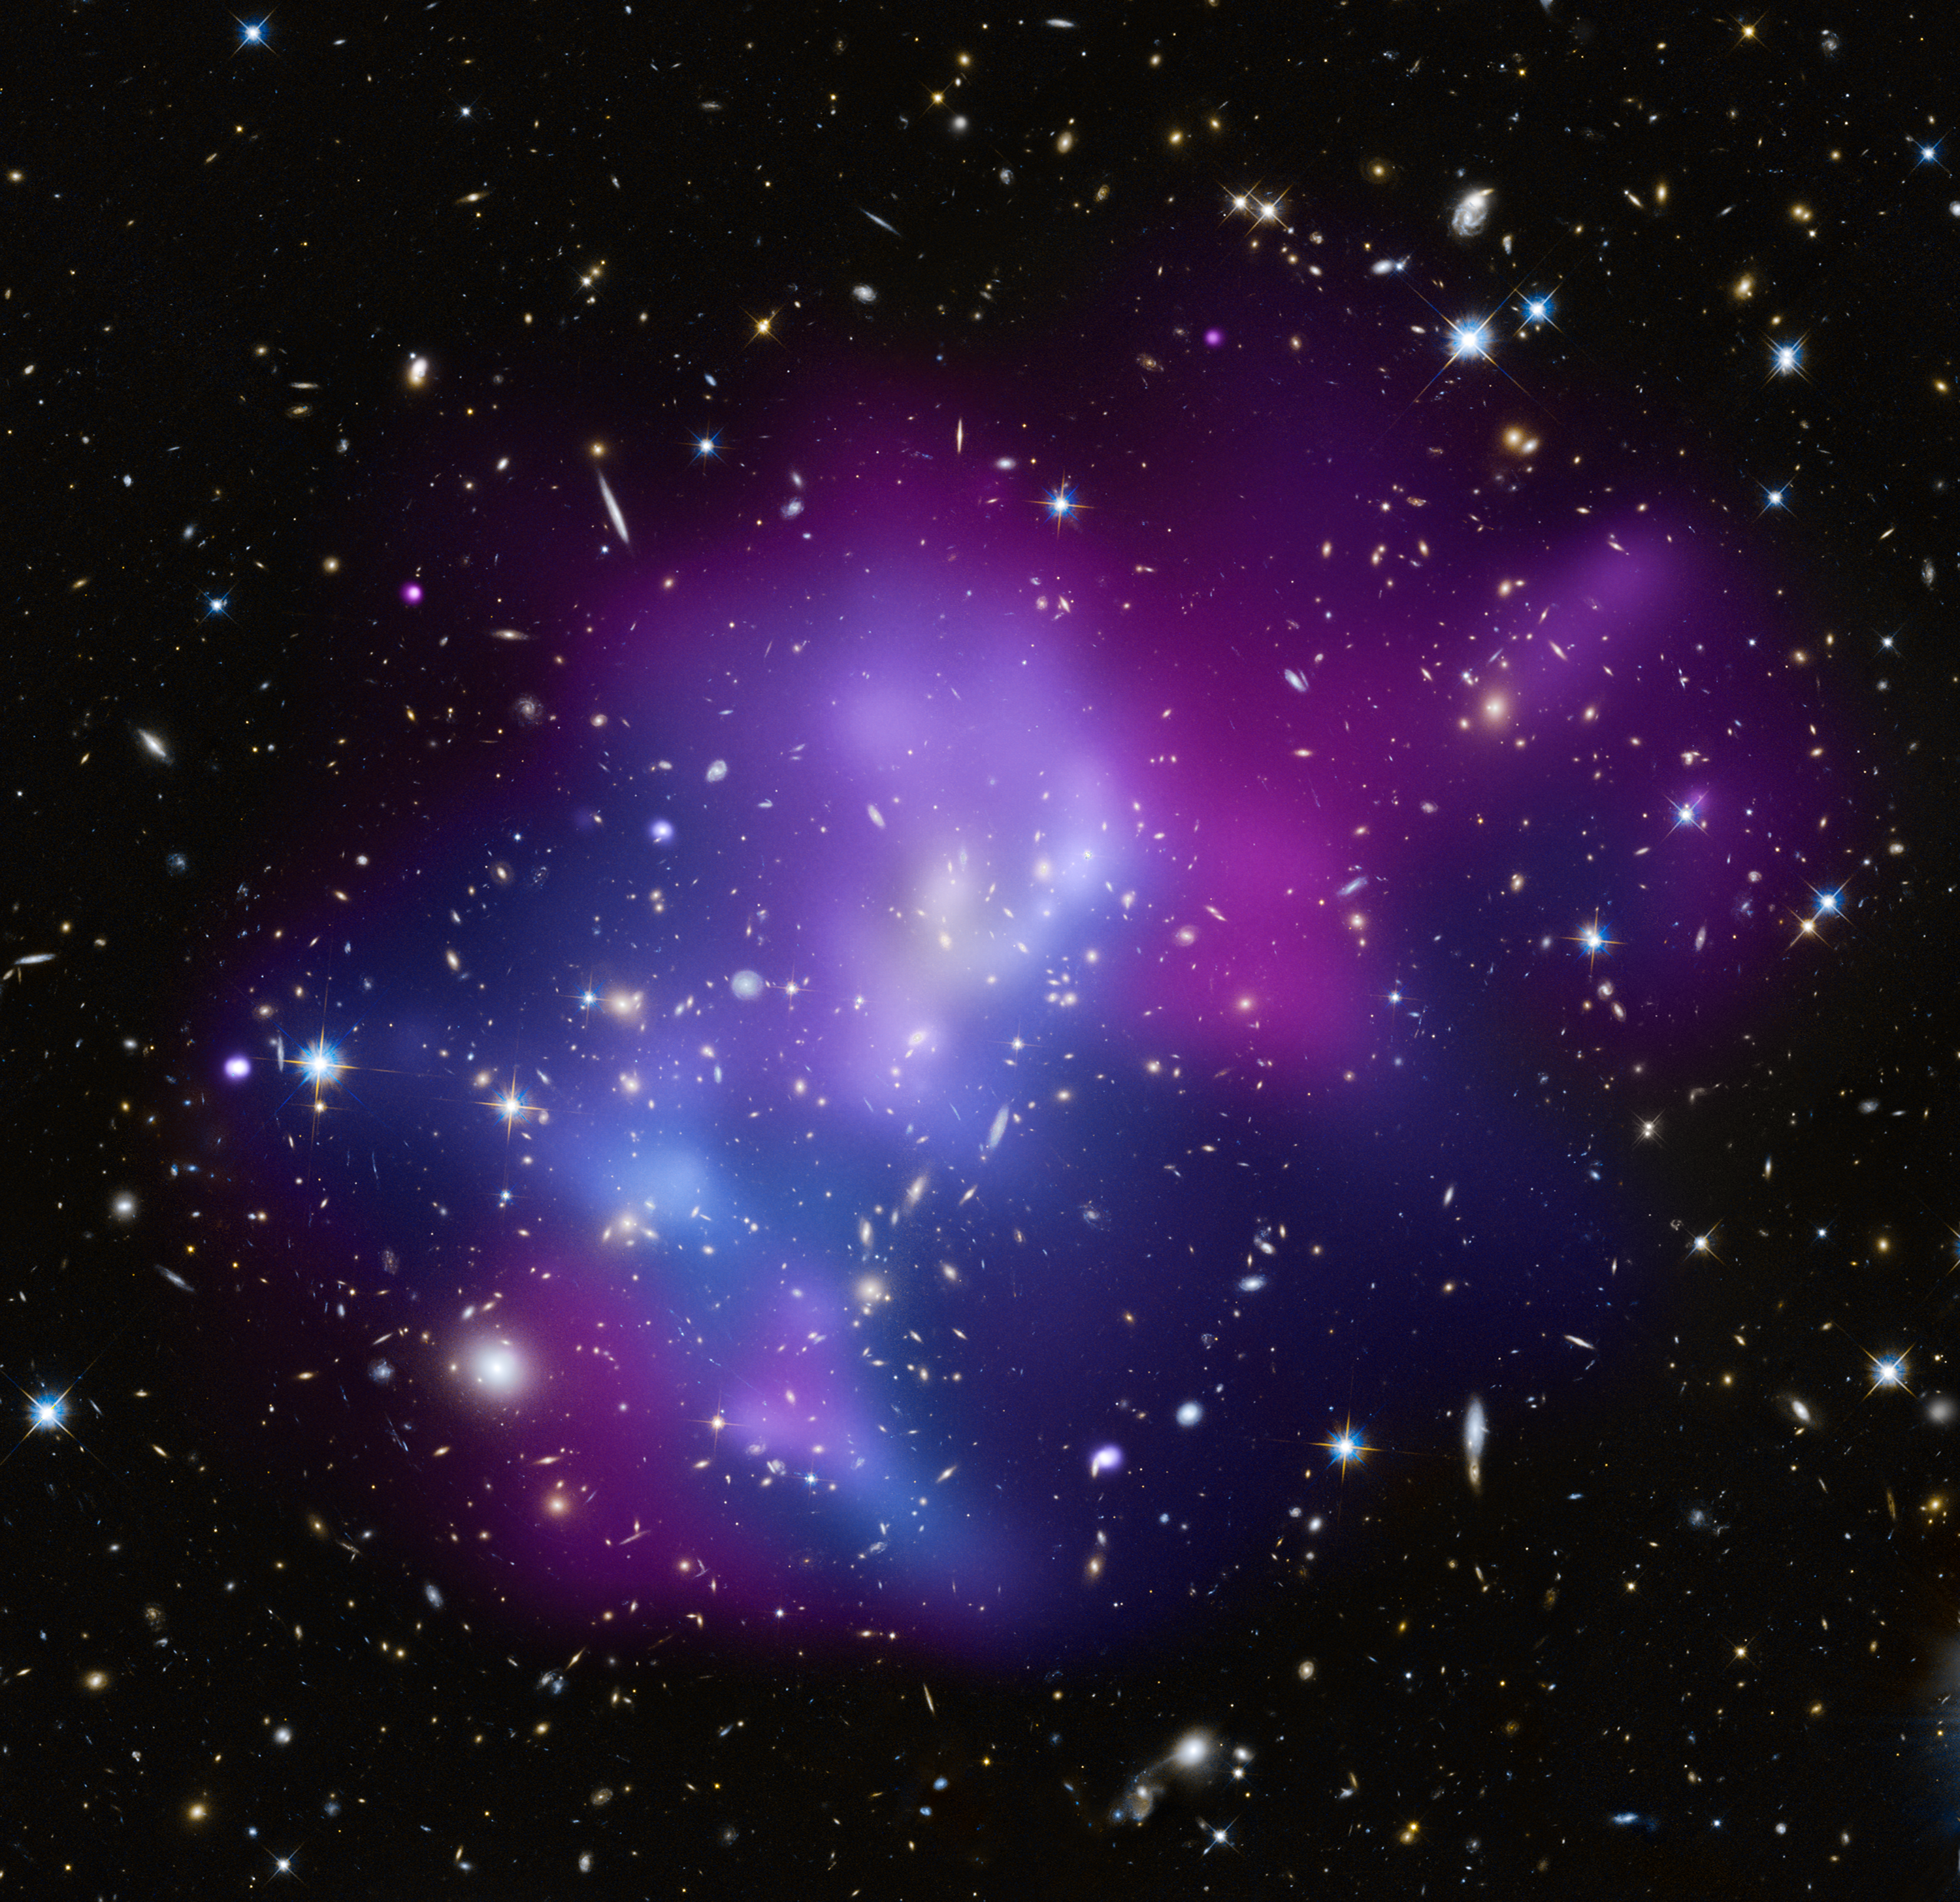

Galaxy cluster MACS J0717

This composite image shows the massive galaxy cluster MACS J0717.5+3745 (MACS J0717, for short), where four separate galaxy clusters have been involved in a collision — the first time such a phenomenon has been documented. Hot gas is shown in an image from NASA's Chandra X-ray Observatory, and galaxies are shown in an optical image from the NASA/ESA Hubble Space Telescope. The hot gas is colour-coded to show temperature, where the coolest gas is reddish purple, the hottest gas is blue, and the temperatures in between are purple.

The repeated collisions in MACS J0717 are caused by a 13-million-light-year-long stream of galaxies, gas, and dark matter — known as a filament — pouring into a region already full of matter. A collision between the gas in two or more clusters causes the hot gas to slow down. However, the massive and compact galaxies do not slow down as much as the gas does, and so move ahead of it. Therefore, the speed and direction of each cluster's motion — perpendicular to the line of sight — can be estimated by studying the offset between the average position of the galaxies and the peak in the hot gas.

MACS J0717 is located about 5.4 billion light-years from Earth. It is one of the most complex galaxy clusters ever seen. Other well-known clusters, like the Bullet Cluster and MACS J0025.4-1222, involve the collision of only two galaxy clusters and show much simpler geometry.

Credit: NASA, ESA, CXC, C. Ma, H. Ebeling and E. Barrett (University of Hawaii/IfA), et al. and STScI